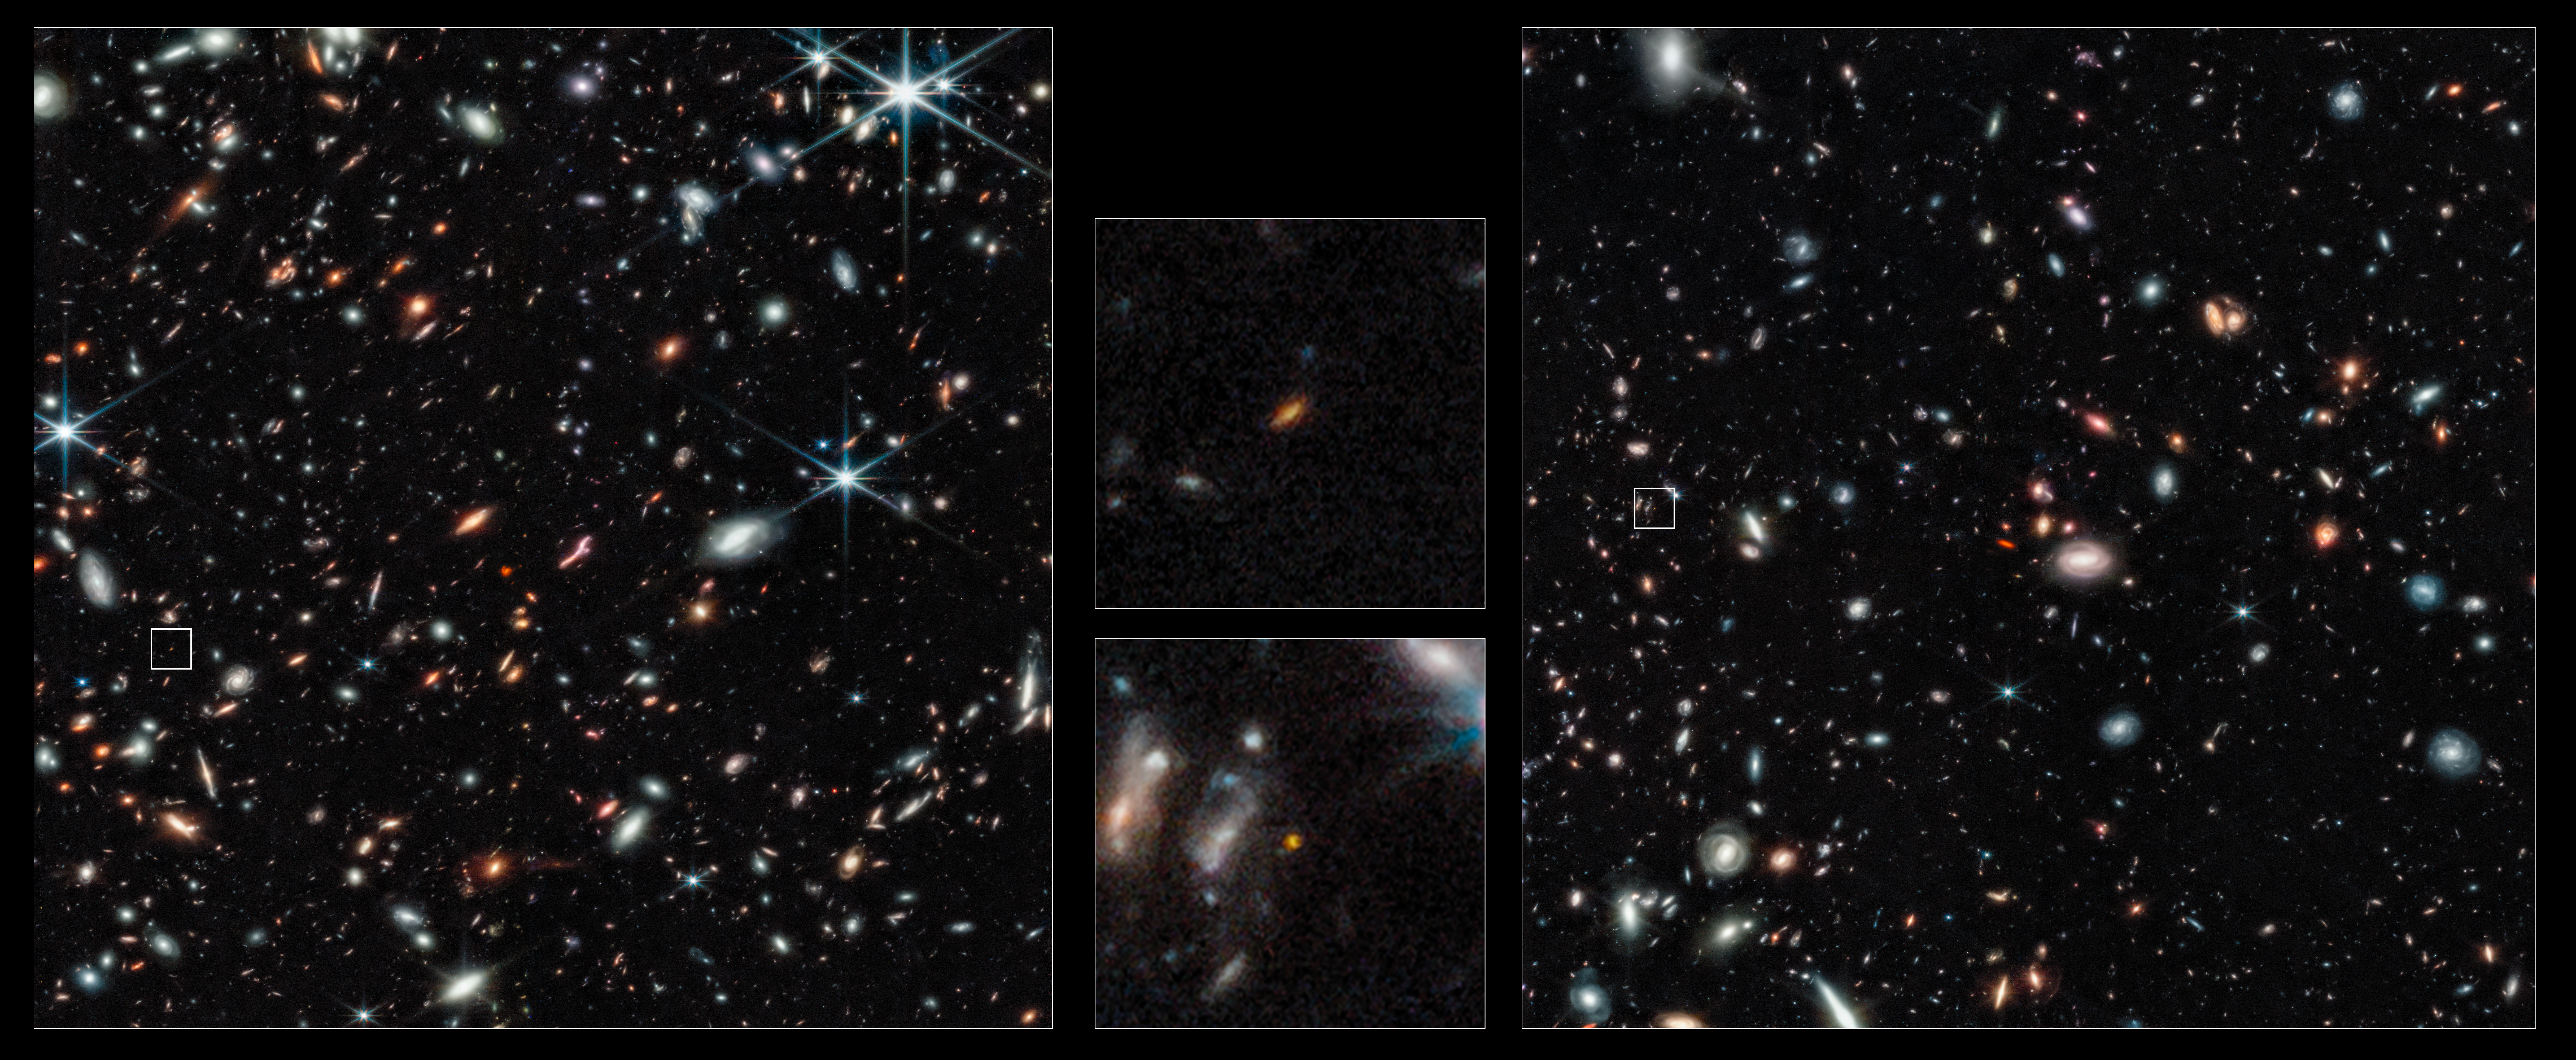

Pandora’s Cluster, Abell 2744 - NIRCam (Clean)

Two of the most distant galaxies seen to date are captured in these Webb pictures of the outer regions of the giant galaxy cluster Abell 2744. The galaxies are not inside the cluster, but many billions of light-years behind it.

The galaxy labelled 1 existed only 450 million years after the Big Bang. The galaxy labelled 2 existed 350 million years after the Big Bang. Both are seen really close in time to the Big Bang which occurred 13.8 billion years ago. These galaxies are tiny compared to our Milky Way, being just a few percent of its size, even the unexpectedly elongated galaxy labelled (1).

Credit: NASA, ESA, CSA, T. Treu (UCLA)